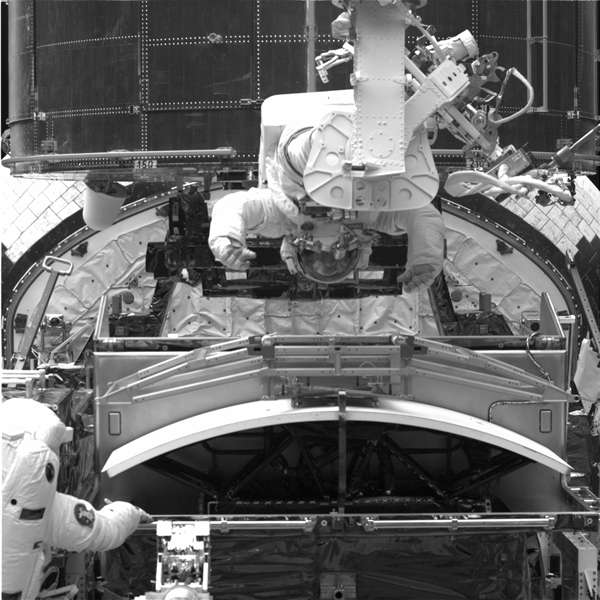

Wide Field and Planetary Camera 2 in enclosure

The Wide Field and Planetary Camera 2 (WFPC2), being readied for insertion into Hubble during the First Servicing Mission.

Credit: NASA